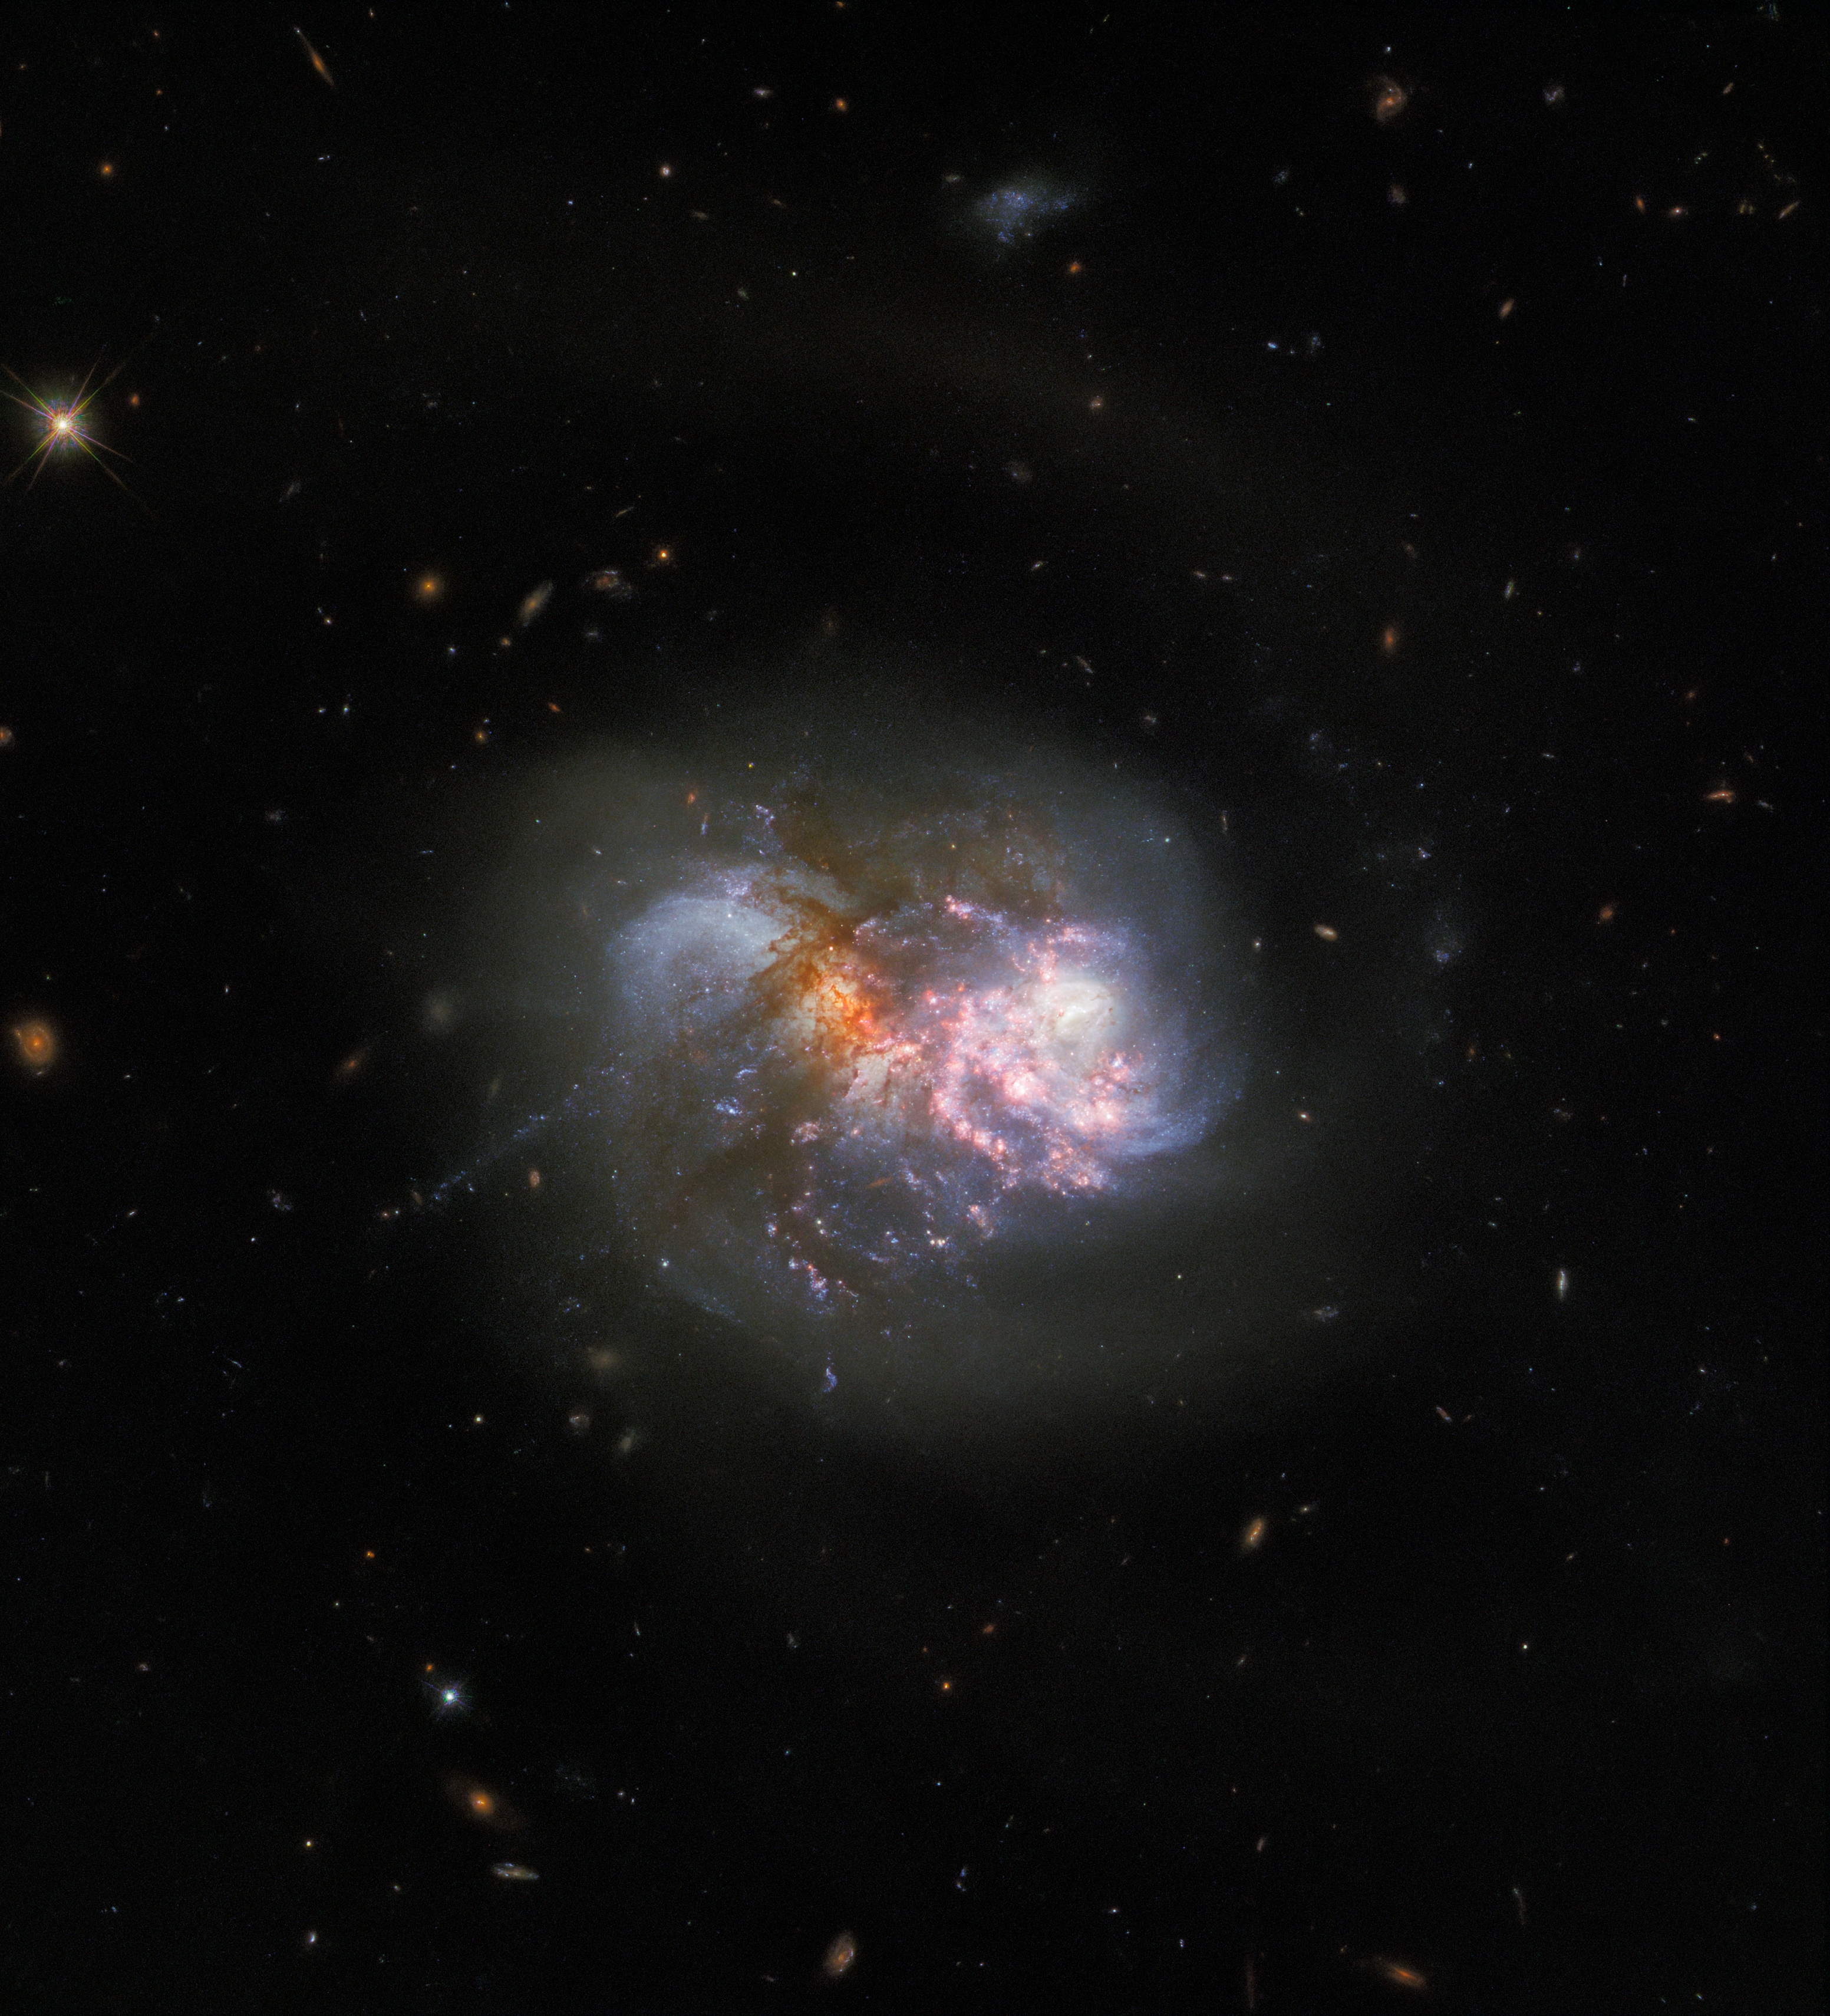

Clash of the Titans

A cataclysmic cosmic collision takes centre stage in this Picture of the Week. The image features the interacting galaxy pair IC 1623, which lies around 275 million light-years away in the constellation Cetus (The Whale). The two galaxies are in the final stages of merging, and astronomers expect a powerful inflow of gas to ignite a frenzied burst of star formation in the resulting compact starburst galaxy.

This interacting pair of galaxies is a familiar sight; Hubble captured IC 1623 in 2008 using two filters at optical and infrared wavelengths using the Advanced Camera for Surveys. This new image incorporates new data from Wide Field Camera 3, and combines observations taken in eight filters spanning infrared to ultraviolet wavelengths to reveal the finer details of IC 1623. Future observations of the galaxy pair with the NASA/ESA/CASA James Webb Space Telescope will shed more light on the processes powering extreme star formation in environments such as IC 1623.

Credit: ESA/Hubble & NASA, R. Chandar